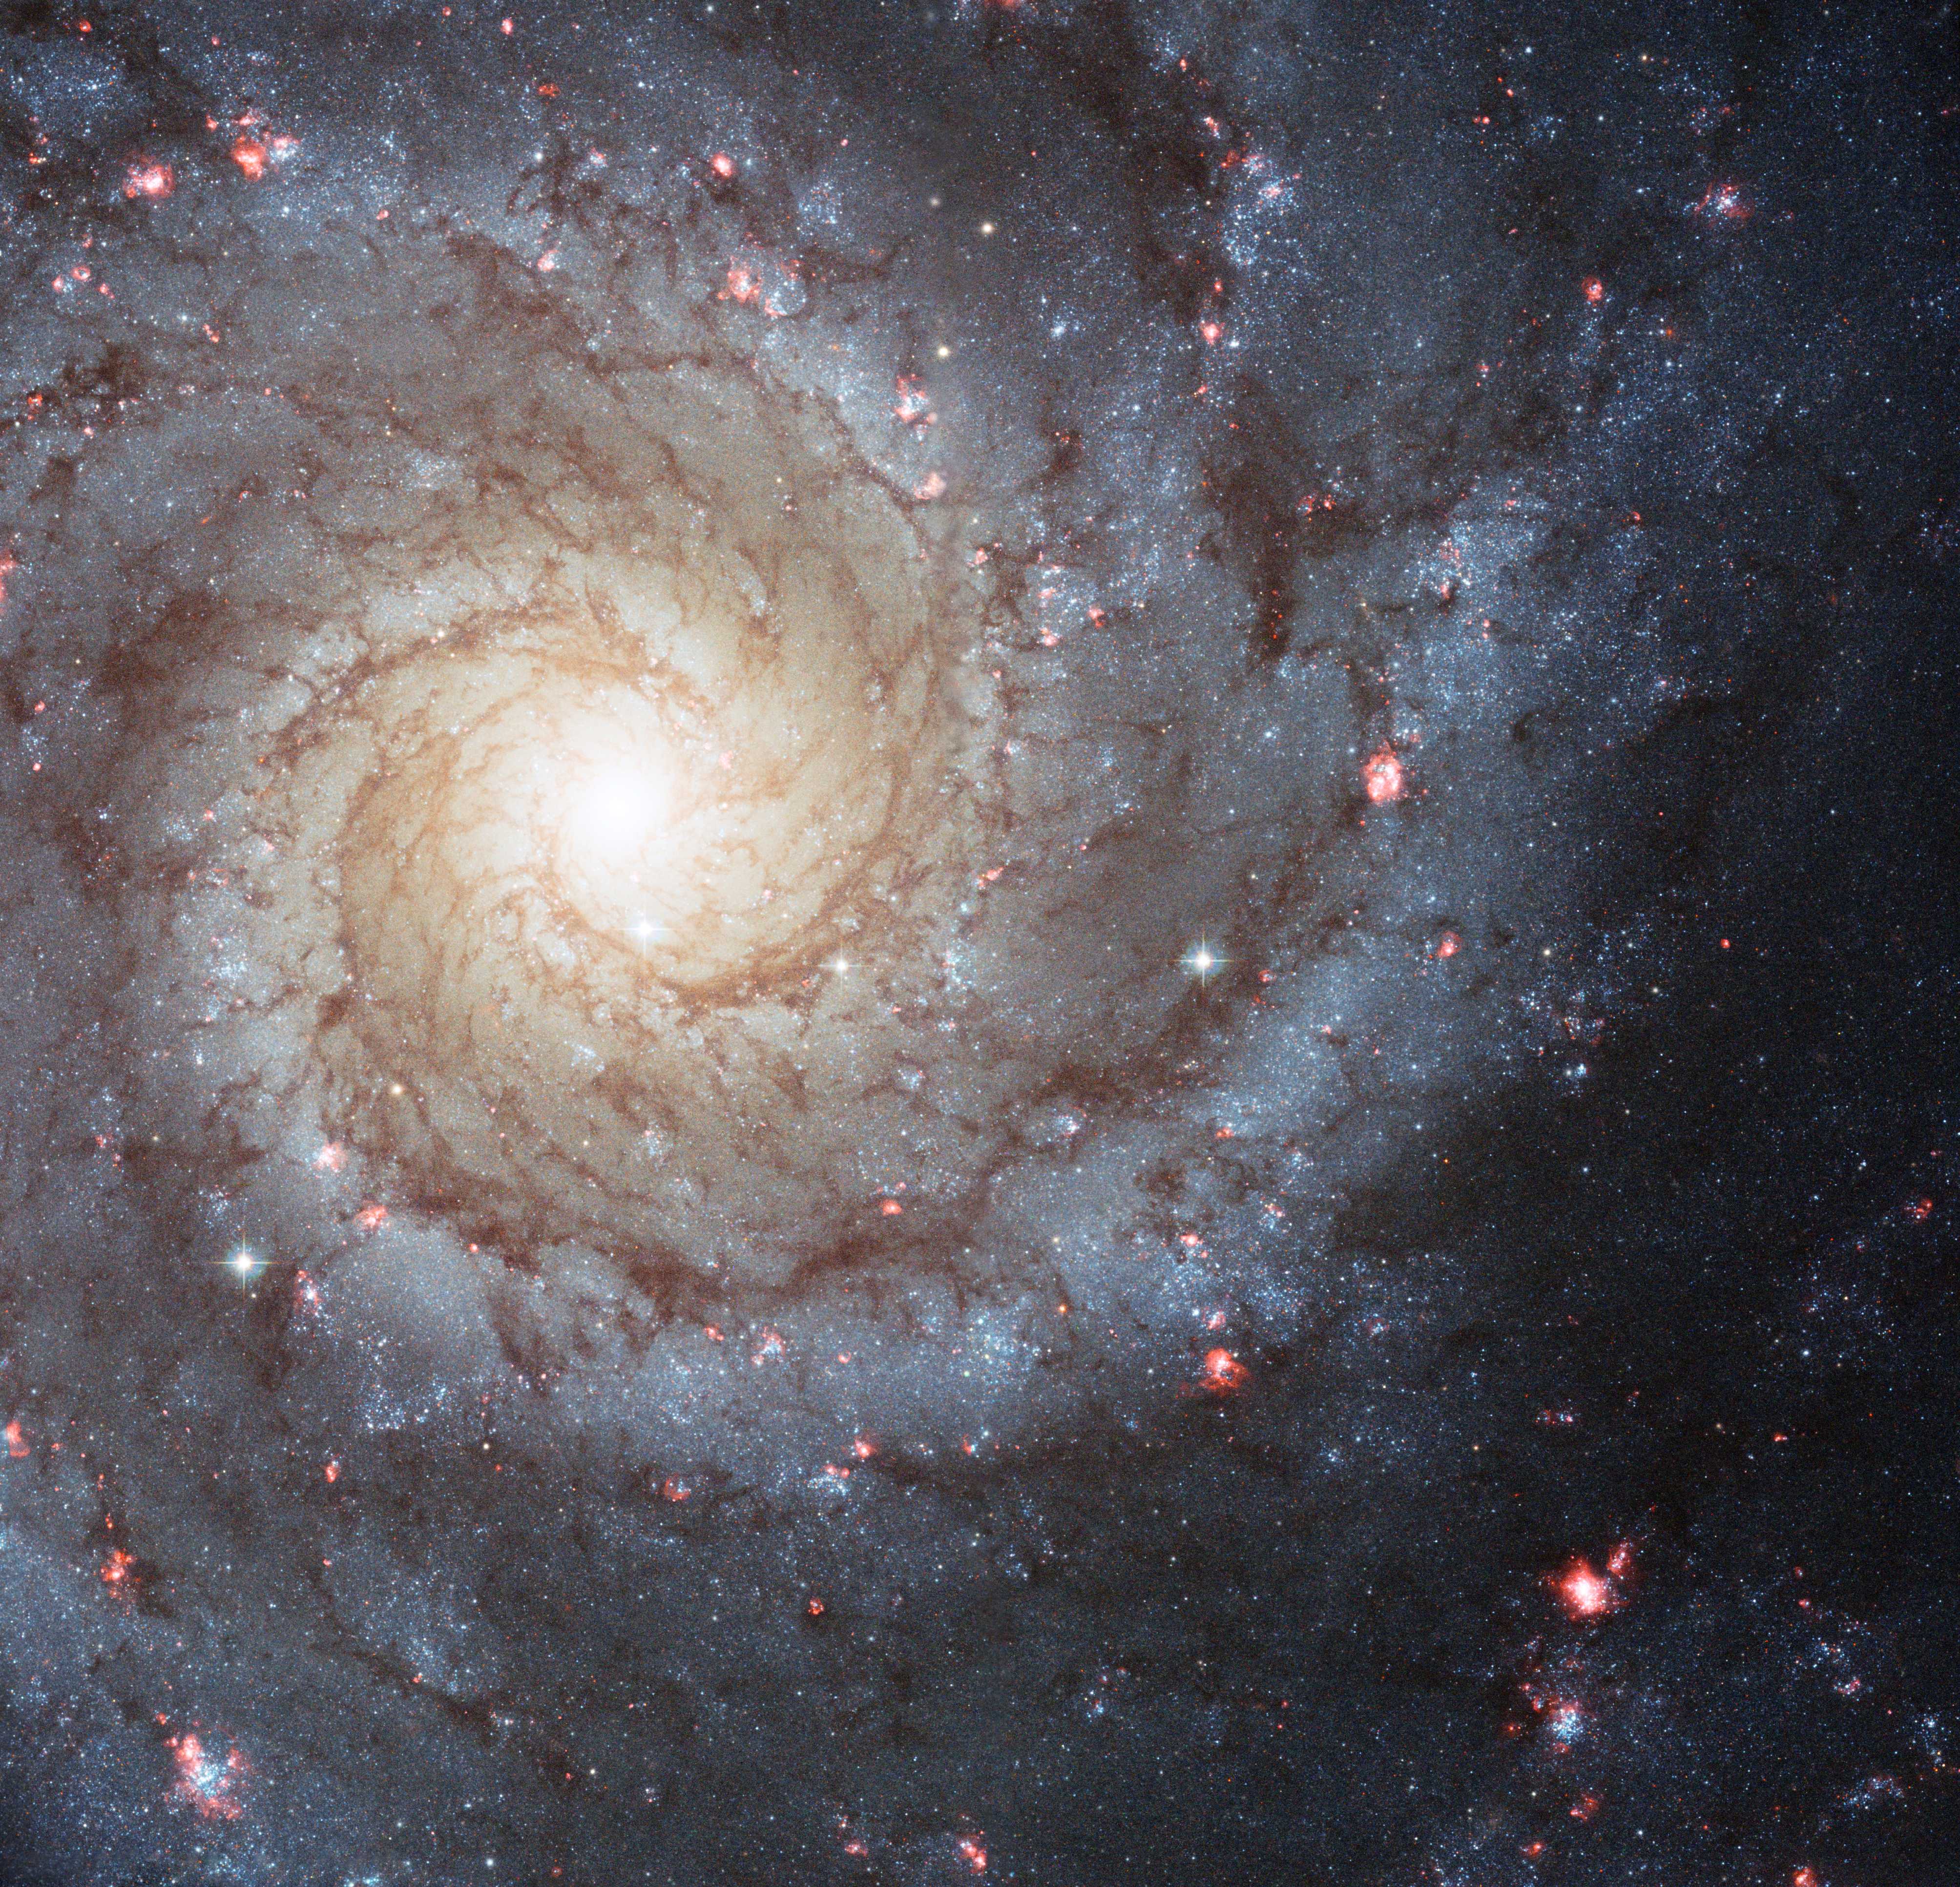

Holiday wishes from the Hubble Space Telescope

In the new Hubble image of the galaxy M74 we can also see a smattering of bright pink regions decorating the spiral arms. These are huge, relatively short-lived, clouds of hydrogen gas which glow due to the strong radiation from hot, young stars embedded within them; glowing pink regions of ionized hydrogen (hydrogen that has lost its electrons). These regions of star formation show an excess of light at ultraviolet wavelengths and astronomers call them HII regions.

Credit: NASA, ESA, and The Hubble Heritage (STScI/AURA)-ESA/Hubble Collaboration